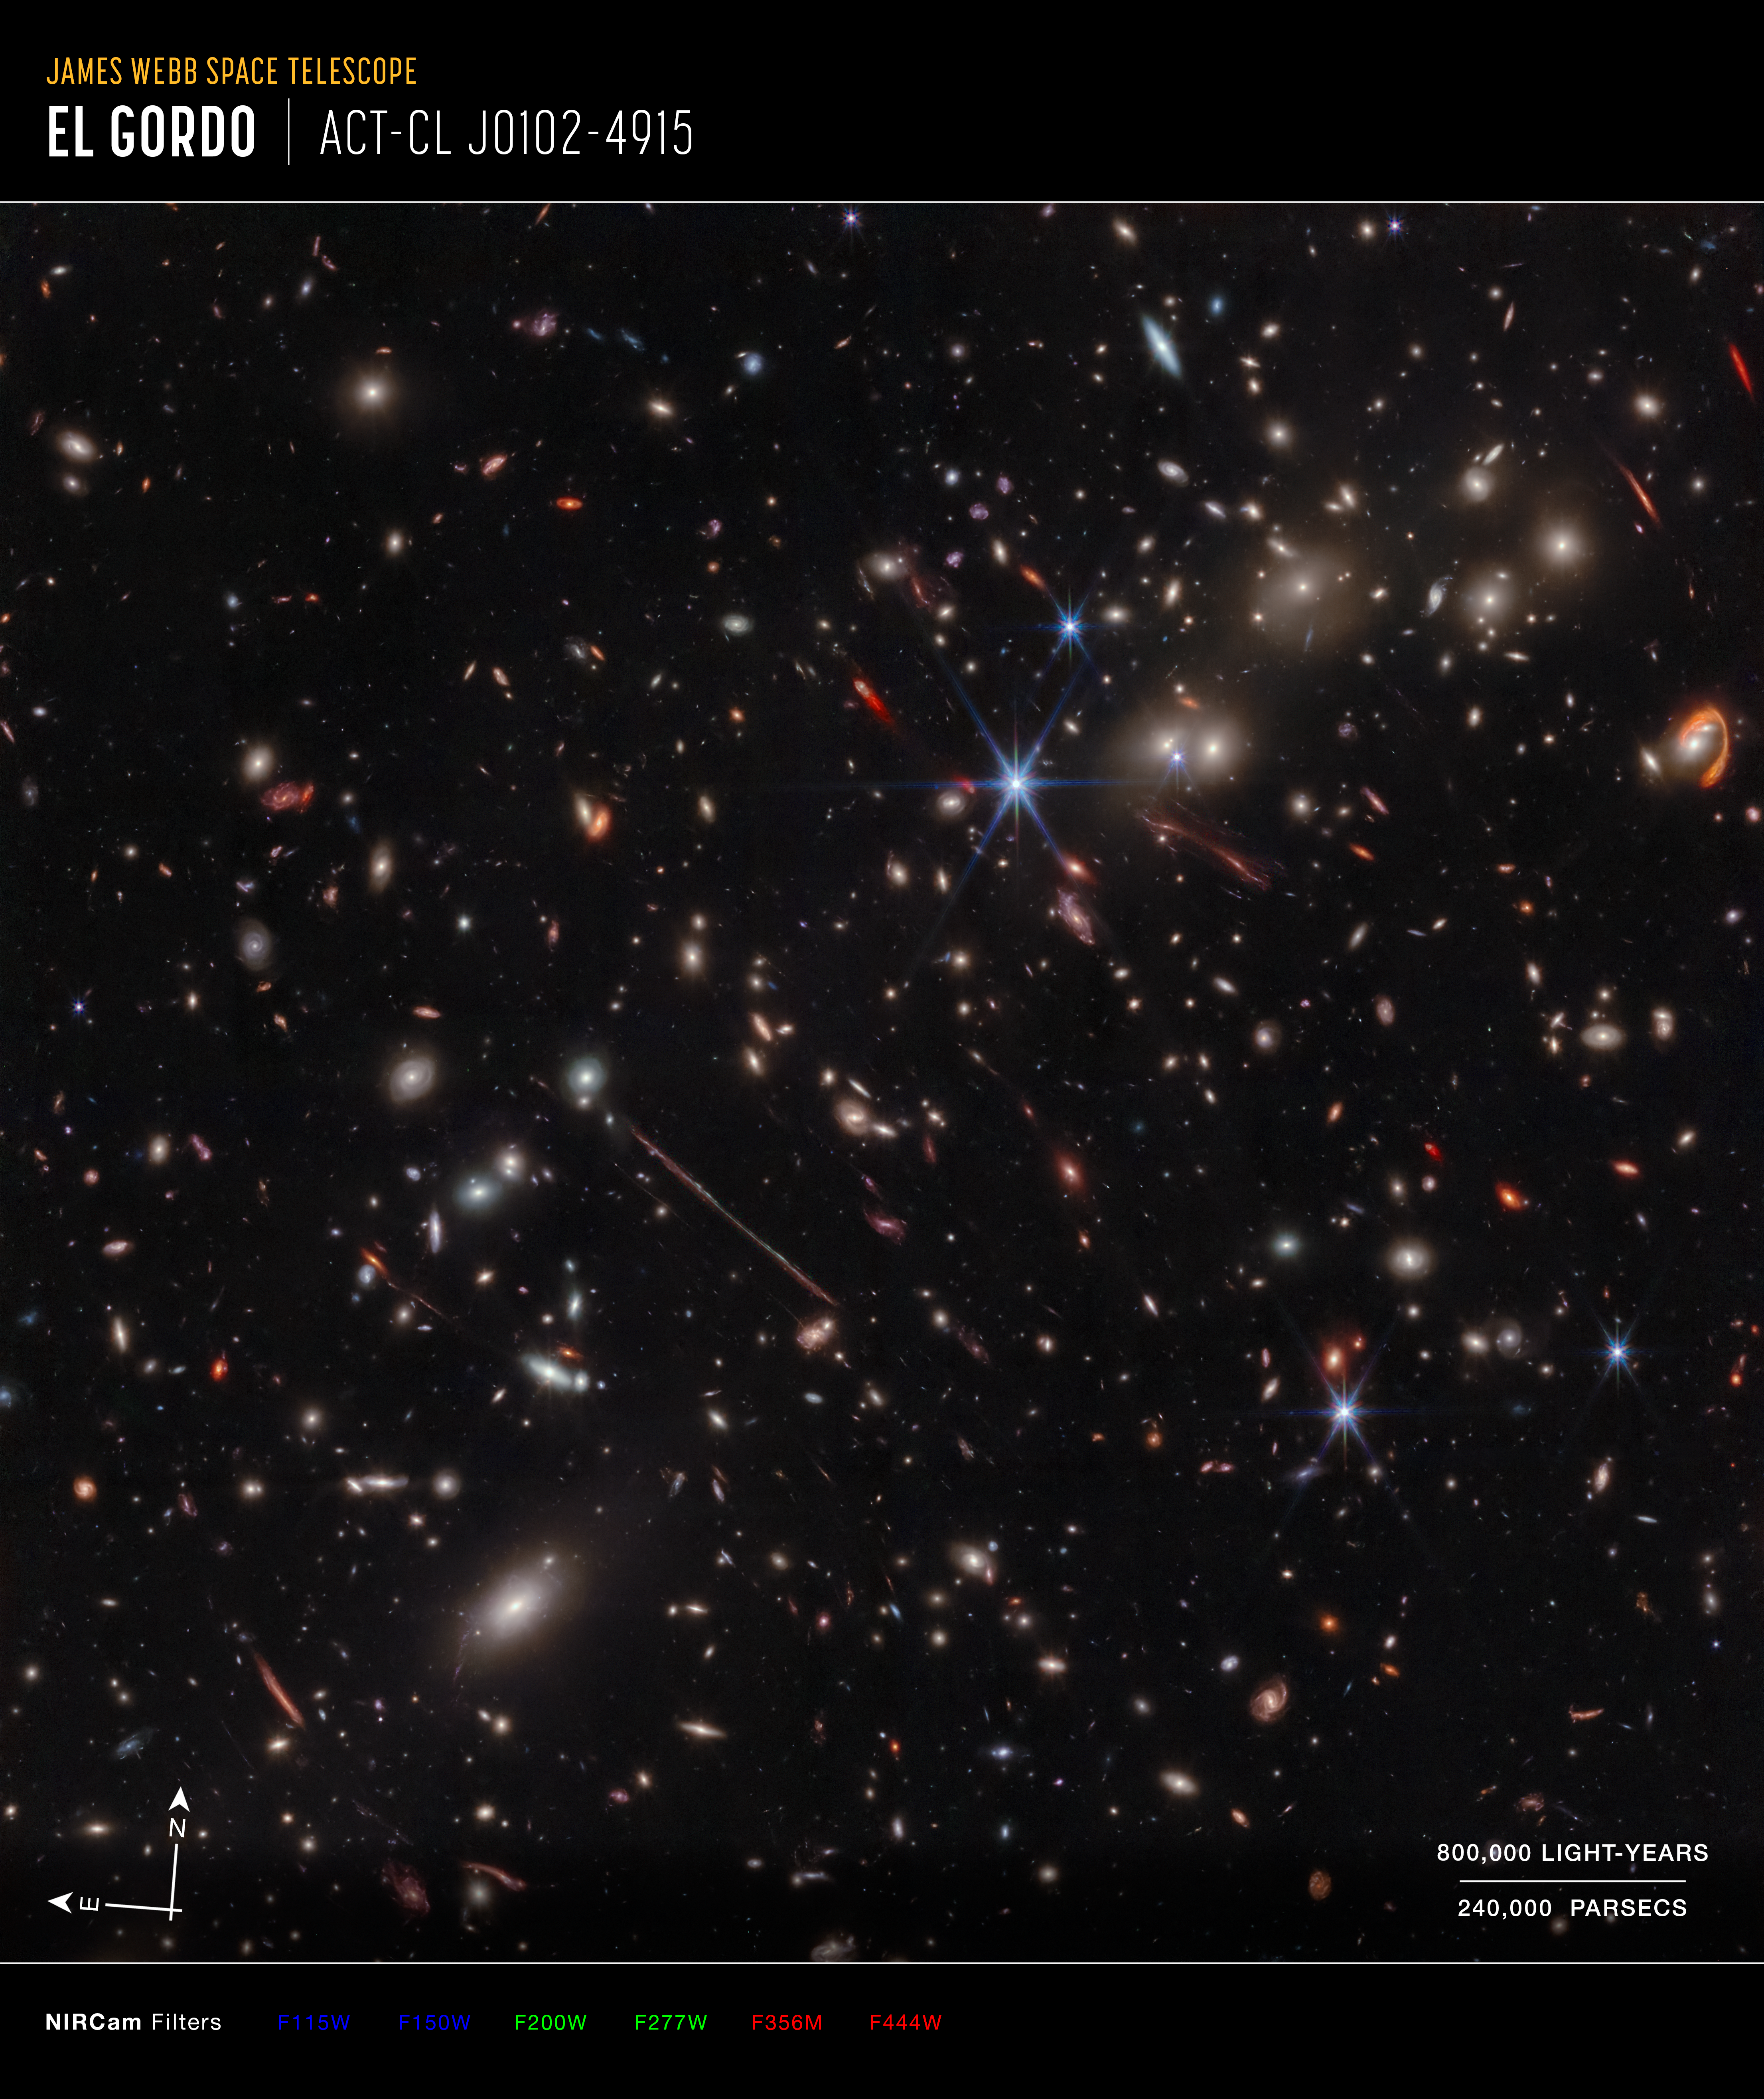

Webb spotlights gravitational arcs in ‘El Gordo’ galaxy cluster (NIRCam image, annotated)

A new image of the galaxy cluster known as “El Gordo” is revealing distant and dusty objects never seen before, and providing a bounty of fresh science. The infrared image, taken by the NASA/ESA/CSA James Webb Space Telescope, displays a variety of unusual, distorted background galaxies that were only hinted at in previous NASA/ESA Hubble Space Telescope images.

El Gordo is a cluster of hundreds of galaxies that existed when the universe was 6.2 billion years old, making it a “cosmic teenager.” It’s the most massive cluster known to exist at that time. (“El Gordo” is Spanish for the “Fat One.”)

El Gordo acts as a gravitational lens, distorting and magnifying the light from distant background galaxies. Two of the most prominent features in the image include the Thin One, located just below and left of the image center, and the Fishhook, a red swoosh at upper right. Both are lensed background galaxies.

Credit: NASA, ESA, CSA, J. Diego (Instituto de Física de Cantabria), B. Frye (University of Arizona), P. Kamieneski (Arizona State University), T. Carleton (Arizona State University), R. Windhorst (Arizona State University), A. Pagan (STScI), J. Summers (Arizona State University), J. D’Silva (University of Western Australia), A. Koekemoer (STScI), A. Robotham (University of Western Australia)